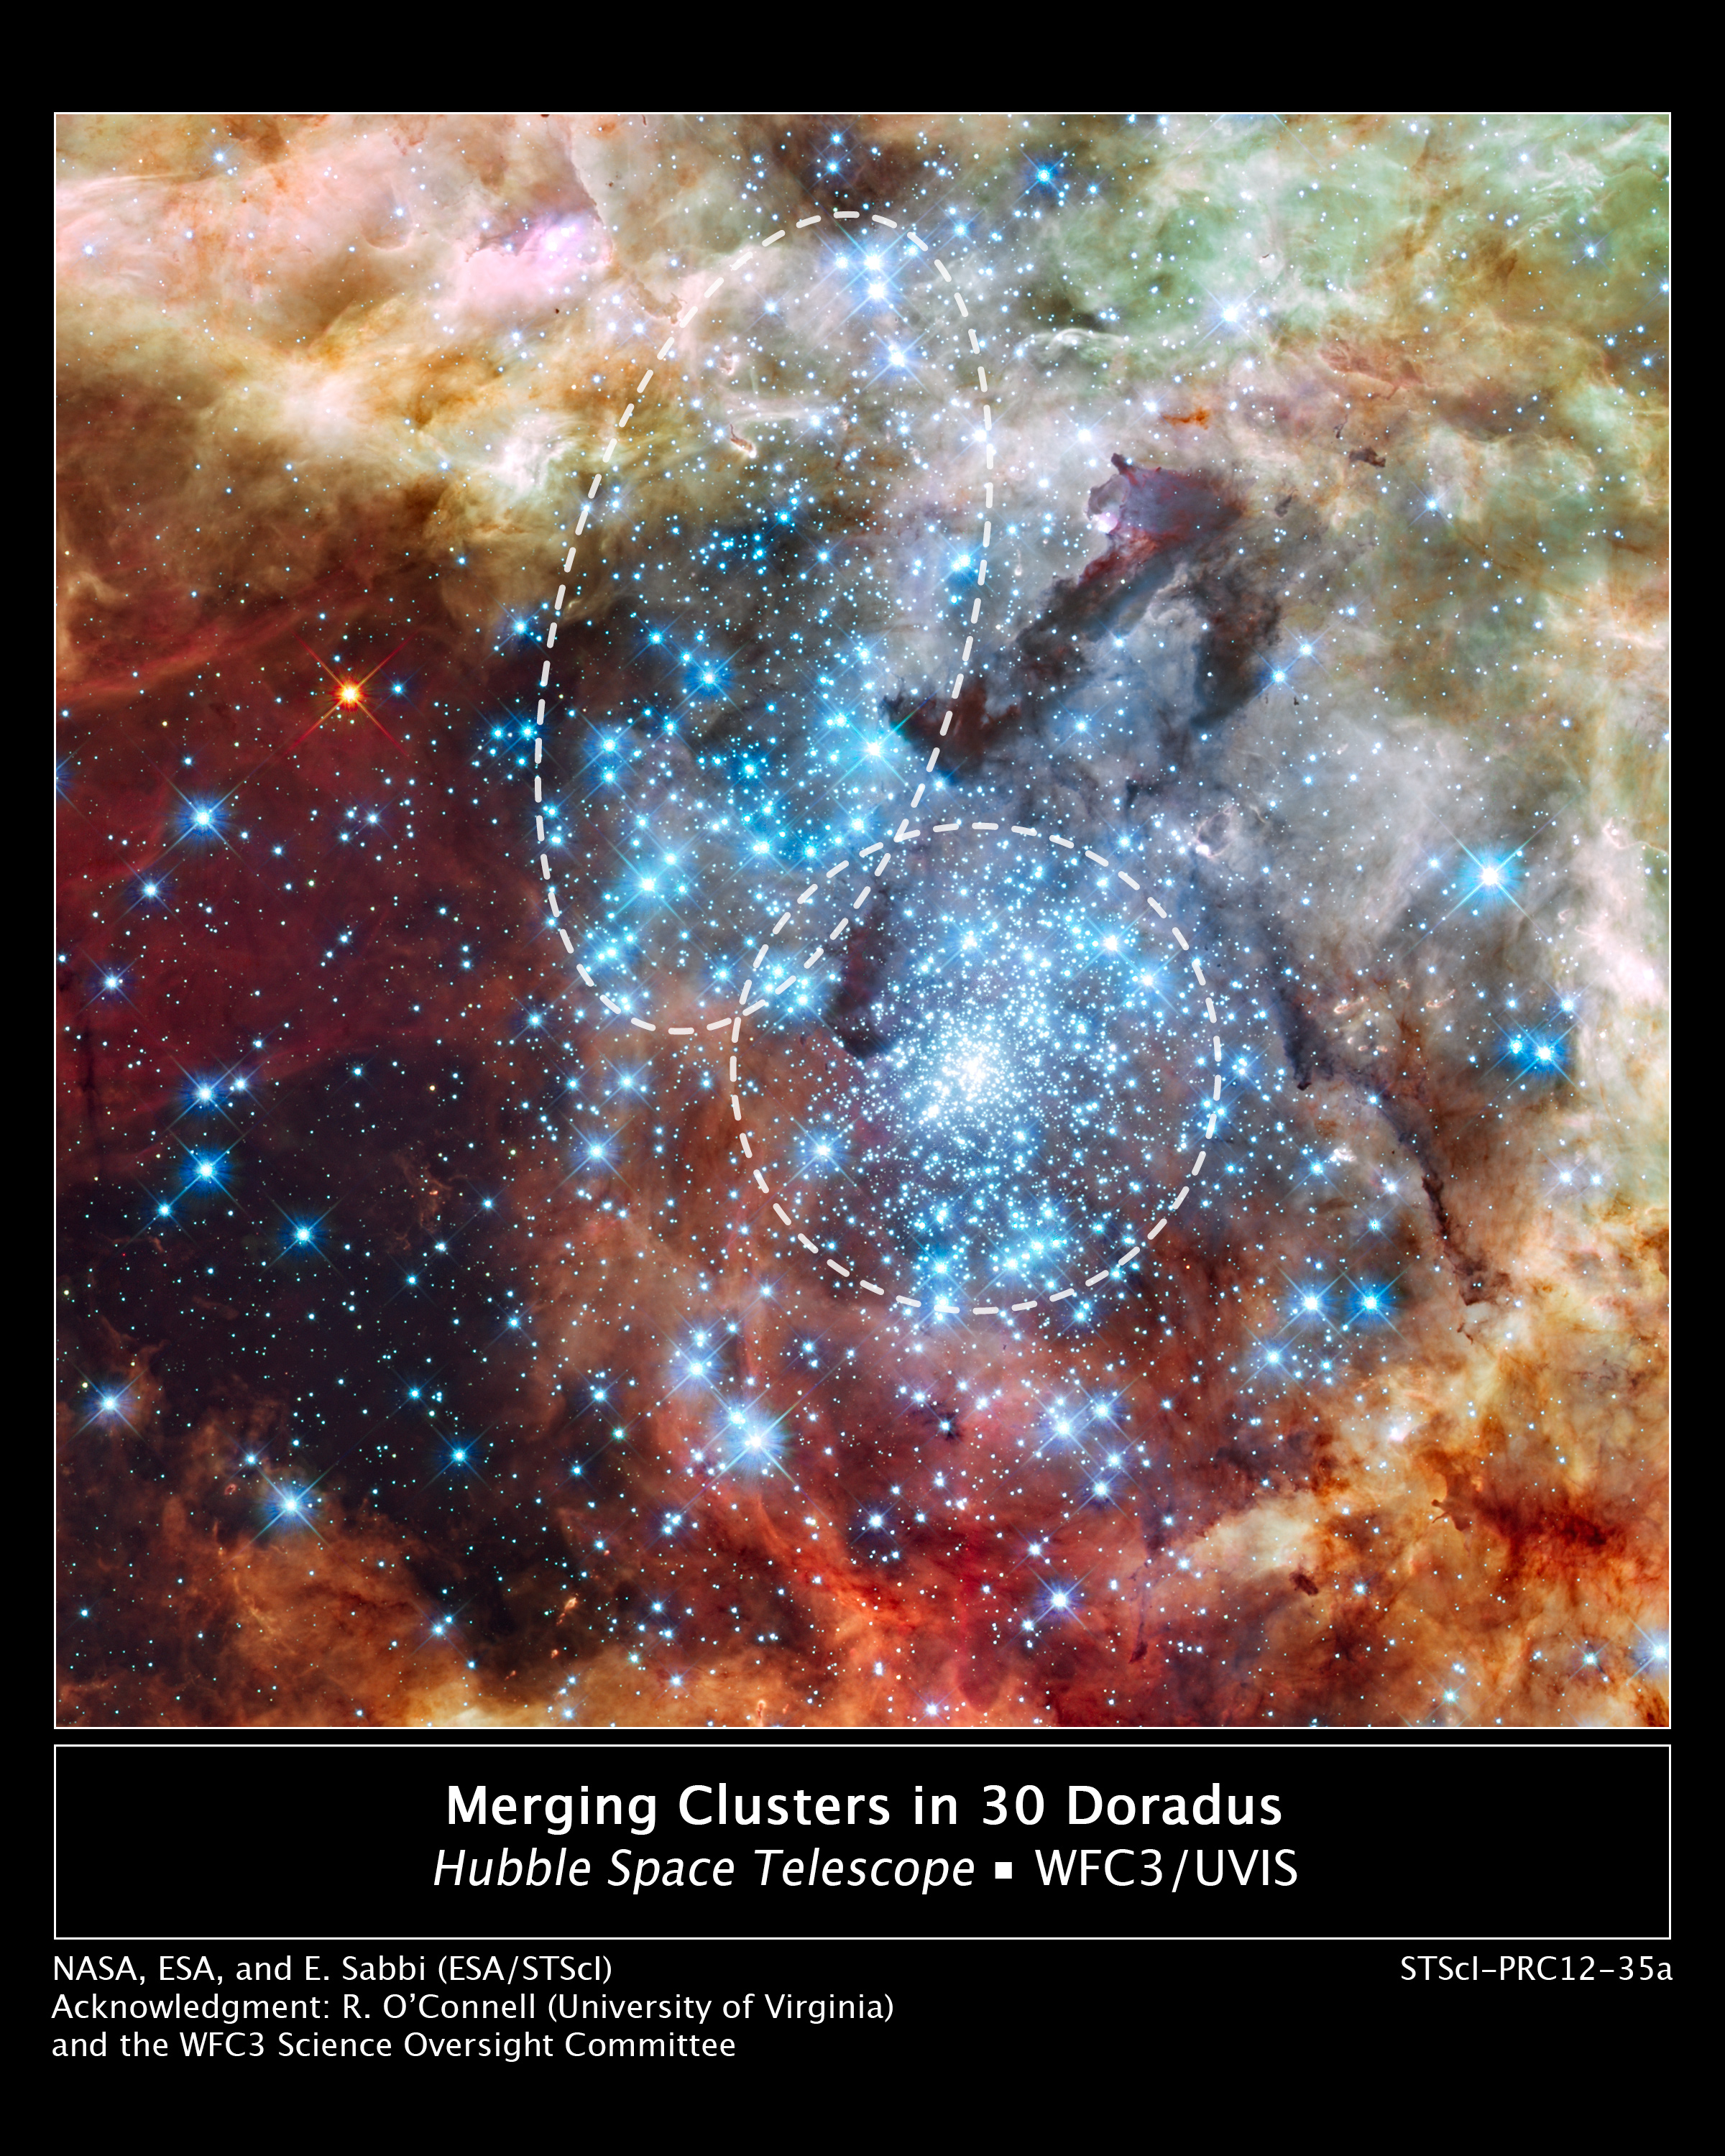

Montage image: merging clusters in 30 Doradus

This is a Hubble Space Telescope image of a pair of star clusters that are believed to be in the early stages of merging. The clusters lie in the gigantic 30 Doradus Nebula, which is 170,000 light-years from Earth.

Hubble's circumstantial evidence for the impending collision comes from seeing an elongated structure in the cluster at upper left, and from measuring a different age between the two clusters. Also, the unusually large number of high-velocity stars around 30 Doradus can finally be explained if a small cluster has merged into the big cluster R136 in the center of the Tarantula Nebula.

This nearby example of cluster interaction yields insights into how star clusters may have formed in the early Universe.

The Hubble observations, made with the Wide Field Camera 3, were taken 20-27 October, 2009. The blue colour is light from the hottest, most massive stars; the green from the glow of oxygen; and the red from fluorescing hydrogen.

Credit: NASA, ESA, and E. Sabbi (ESA/STScI) Acknowledgment: R. O'Connell (University of Virginia) and the Wide Field Camera 3 Science Oversight Committee